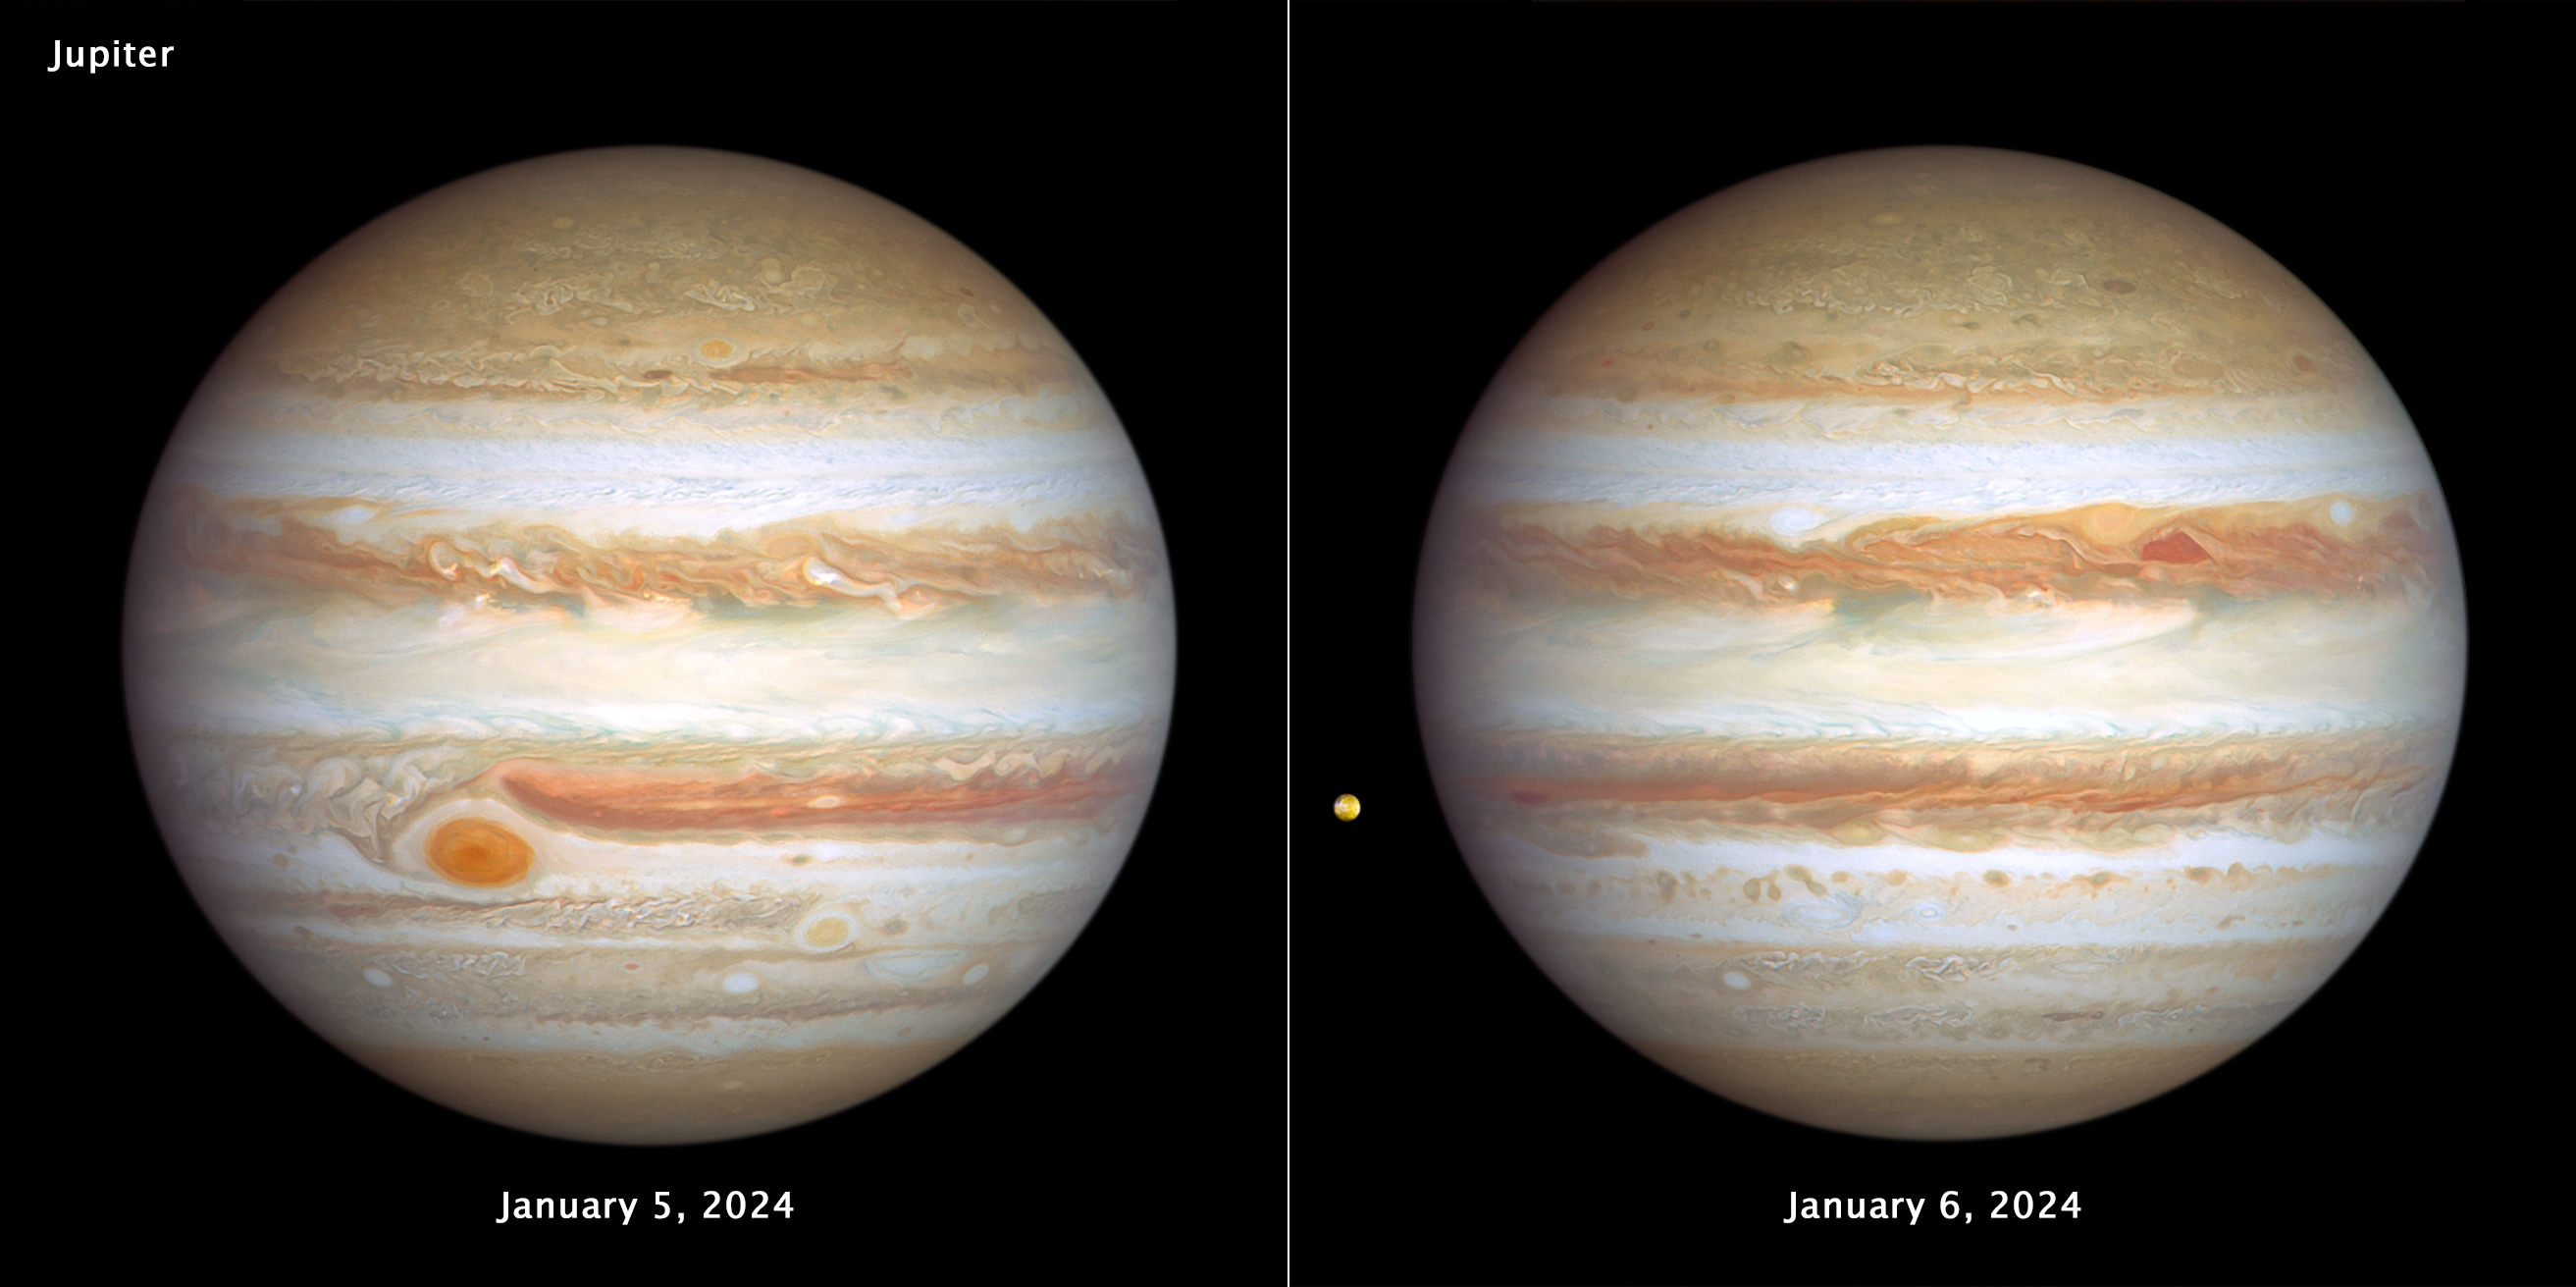

Hubble’s two new views of Jupiter (January 2024)

The giant planet Jupiter, in all its banded glory, is revisited by the NASA/ESA Hubble Space Telescope in these latest images, taken on 5–6 January 2024, that capture both sides of the planet. Hubble monitors Jupiter and the other outer Solar System planets every year under the Outer Planet Atmospheres Legacy programme (OPAL). This is because these large worlds are shrouded in clouds and hazes stirred up by violent winds, leading to a kaleidoscope of ever-changing weather patterns.

[left image] - Big enough to swallow Earth, the classic Great Red Spot stands out prominently in Jupiter's atmosphere. To its lower right, at a more southerly latitude, is a feature sometimes dubbed Red Spot Jr. This anticyclone was the result of storms merging in 1998 and 2000, and it first appeared red in 2006 before returning to a pale beige in subsequent years. This year it is somewhat redder again. The source of the red coloration is unknown but may involve a range of chemical compounds: sulphur, phosphorus or organic material. Staying in their lanes, but moving in opposite directions, Red Spot Jr. passes the Great Red Spot about every two years. Another small red anticyclone appears in the far north.

[right image] - Storm activity also appears in the opposite hemisphere. A pair of storms: a deep red cyclone and a reddish anticyclone, appear to be next to each other at right of centre. They look so red that at first glance, it looks like Jupiter skinned a knee. These storms are rotating in opposite directions, indicating an alternating pattern of high- and low-pressure systems. For the cyclone, there’s an upwelling on the edges with clouds descending in the middle causing a clearing in the atmospheric haze.

The storms are expected to bounce past each other because their opposing clockwise and counterclockwise rotations make them repel each other.

Toward the left edge of the image is the innermost Galilean moon, Io — the most volcanically active body in the Solar System, despite its small size (only slightly larger than Earth's moon). Hubble resolves volcanic outflow deposits on the surface. Hubble's sensitivity to blue and violet wavelengths clearly reveals interesting surface features.

Credit: NASA, ESA, J. DePasquale (STScI), A. Simon (NASA-GSFC)